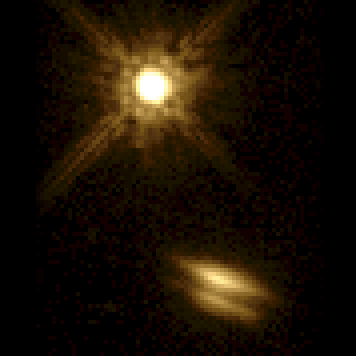

Disk Around Young Star. A View of HK Tauri

HK Tauri is the first example of a young binary star system with an edge-on disk around one member of the pair. The thin, dark disk is illuminated by the light of its hidden central star. The absence of jets indicates that the star is not actively accreting material from this disk. The disk diameter is 20 billion miles (about 32 billion kilometres). The brighter primary star appears at top of the image.

Credit: Karl Stapelfeldt (JPL) and NASA/ESA